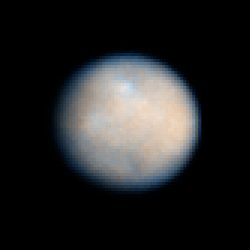

Colour view of Ceres

This is a NASA/ESA Hubble Space Telescope colour image of Ceres, the largest object in the asteroid belt.

Astronomers enhanced the sharpness in these Advanced Camera for Surveys images to bring out features on Ceres' surface, including brighter and darker regions that could be asteroid impact features. The observations were made in visible and ultraviolet light between December 2003 and January 2004.

The colours represent the differences between relatively red and blue regions. These differences may simply be due to variation on the surface among different types of material.

Ceres' round shape suggests that its interior is layered like those of terrestrial planets such as Earth. Ceres may have a rocky inner core, an icy mantle, and a thin, dusty outer crust inferred from its density and rotation rate of 9 hours. Ceres is approximately 590 miles (950 kilometers) across and was first discovered in 1801.

Credit: NASA, ESA, J. Parker (Southwest Research Institute), P. Thomas (Cornell University), L. McFadden (University of Maryland, College Park), and M. Mutchler and Z. Levay (STScI)